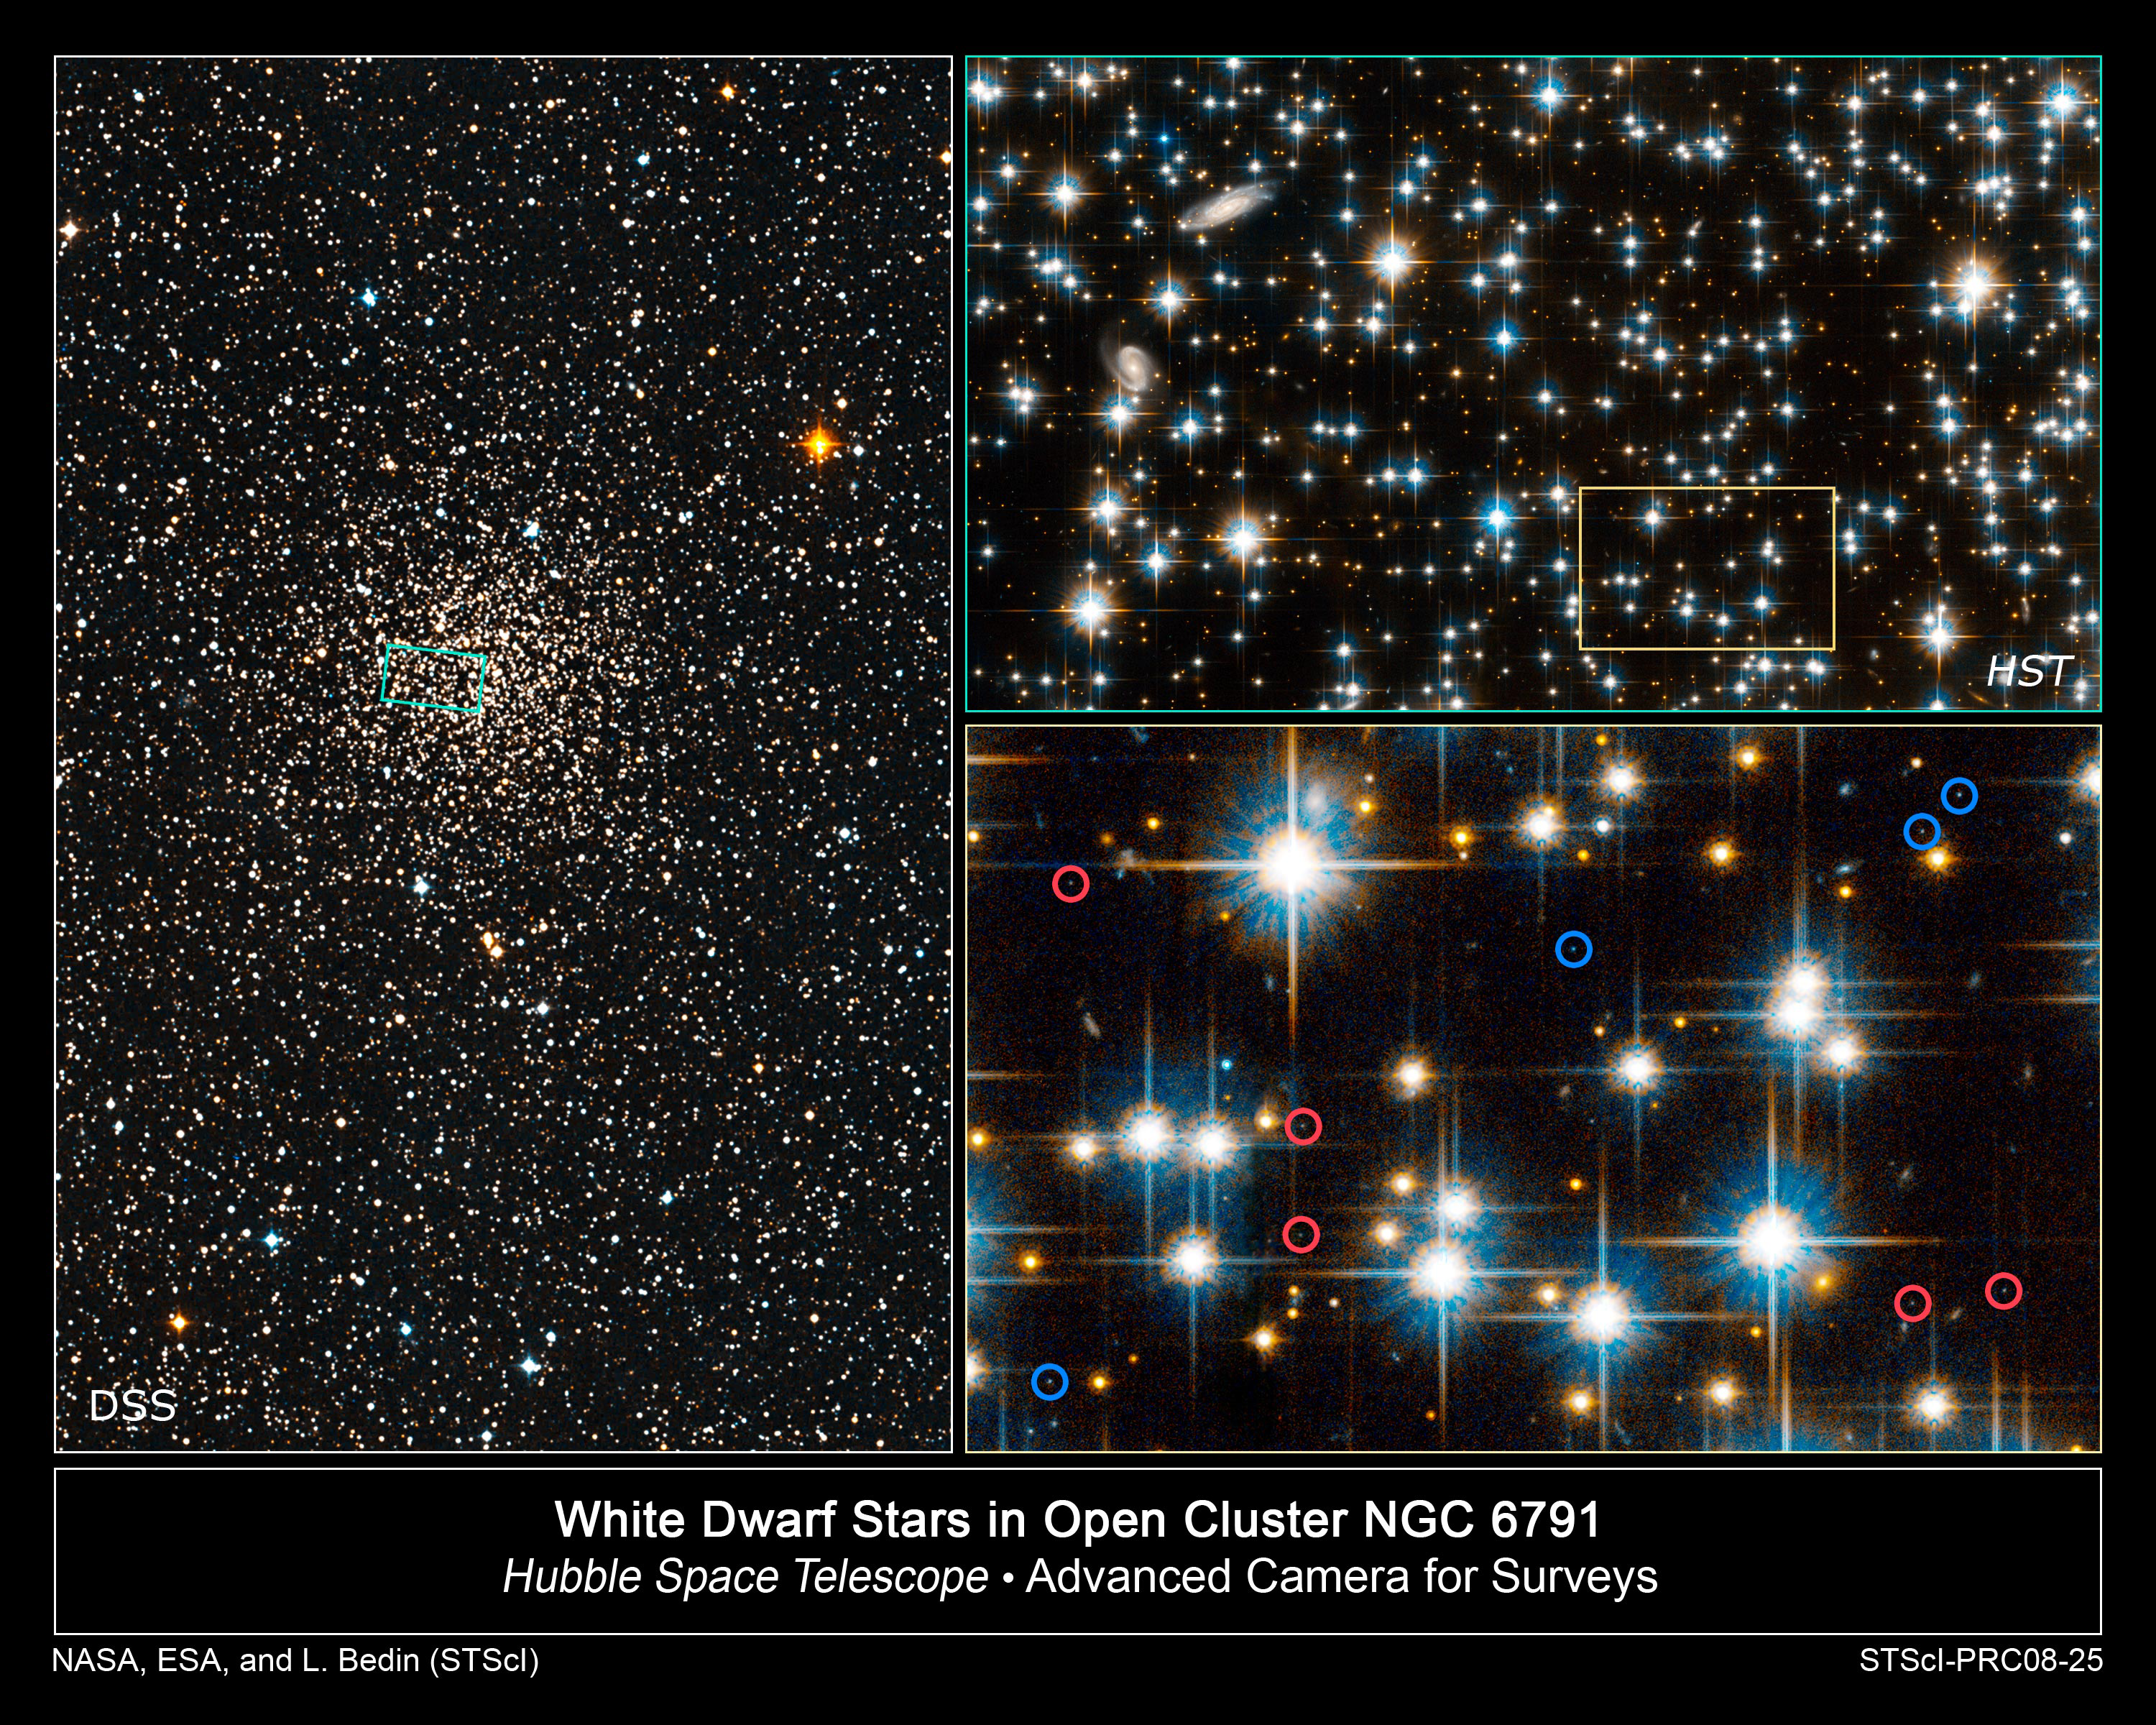

White dwarf stars in open cluster NGC 6791

In studying the dimmest burned-out stars in globular star cluster NGC 6791, the NASA/ESA Hubble Space Telescope has uncovered a paradox: three different populations of stars exist in an object where all the stars should have formed at the same time out of an interstellar cloud of gas and dust.

[Left] - This is a ground-based telescopic view of NGC 6791, located 13,300 light-years away in the constellation Lyra. The green inset box shows the view with Hubble's Advanced Camera for Surveys.

[Top right] - The full Hubble Advanced Camera for Surveys field is full of stars estimated to be 8 billion years old. Two background galaxies can be seen at upper left.

[Bottom right] - A blow up of view of a small region of the Advanced Camera for Surveys field reveals very faint white dwarfs. The blue circles identify hotter dwarfs that are 4 billion years old. The red circles identify cooler dwarfs that are 6 billion years old.

Credit: NASA, ESA, and L. Bedin (STScI)